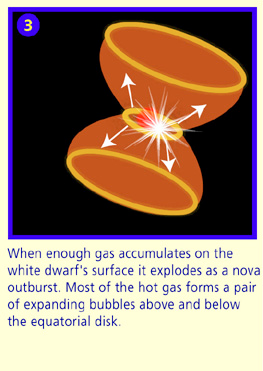

Panel 3

When enough gas accumulates on the white dwarf's surface it explodes as a nova outburst. Most of the hot gas forms a pair of expanding bubbles above and below the equatorial disk.

Credit: NASA & ESA